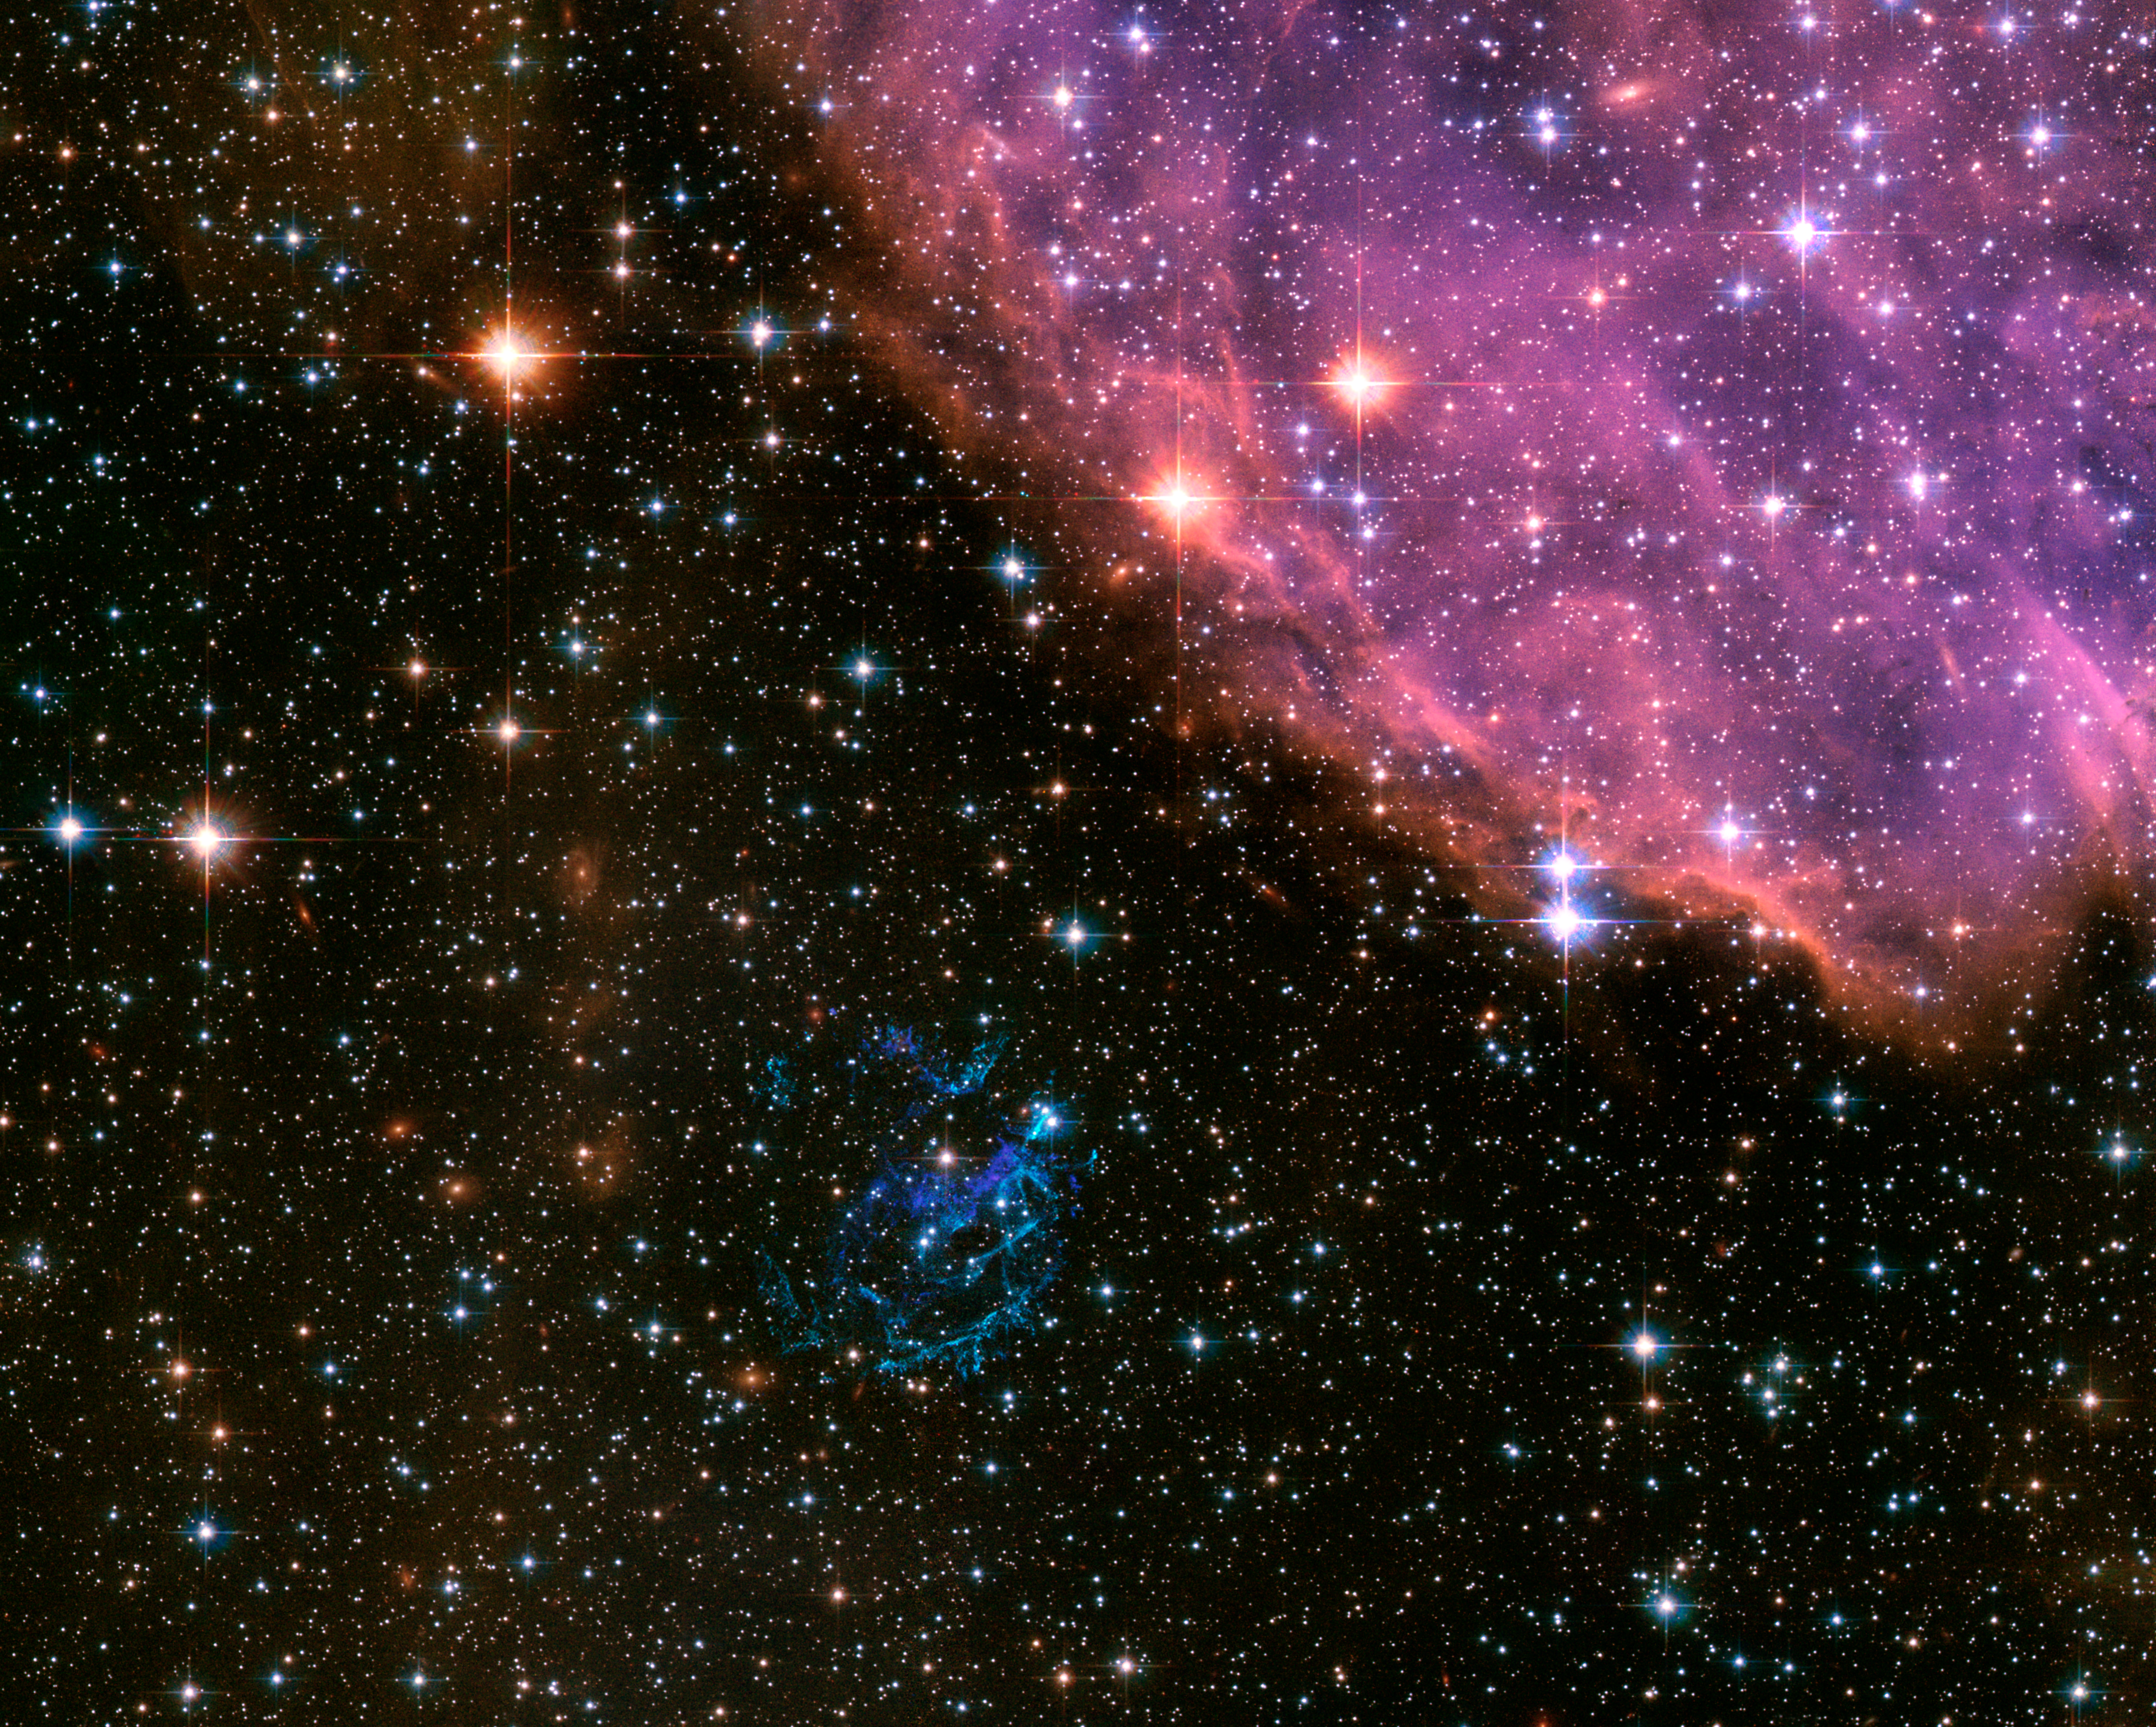

Hubble’s Distant View of the Supernova Remnant 1E 0102.2-7219 in 2006

In the wake of Independence Day festivities surrounding the U.S. July 4th holiday, astronomers and image processors at the Space Telescope Science Institute are releasing the Hubble Space Telescope image of a cosmic explosion that is quite similar to fireworks on Earth. In the nearby galaxy, the Small Magellanic Cloud, a massive star has exploded as a supernova, and begun to dissipate its interior into a spectacular display of colorful filaments. The supernova remnant (SNR), known as "E0102" for short, is the greenish-blue shell of debris just below the center of the Hubble image. Its name is derived from its cataloged placement (or coordinates) in the celestial sphere. More formally known as 1E0102.2-7219, it is located almost 50 light-years (15 parsecs) away from of the edge of the massive star-forming region, N 76, also known as Henize 1956 in the Small Magellanic Cloud.

This delicate structure glowing a multitude of lavenders and peach hues, resides in the upper right of the image. The composition and thus, the coloring, of the diffuse remnant in comparison to its star-forming neighbor is due to the presence of very large quantities of oxygen compared to hydrogen. E0102 is a member of the oxygen-rich class of SNRs showing strong oxygen and other more metal-like abundances in its optical and X-ray spectra, and an absence of hydrogen and helium. N 76 in contrast is made up primarily of glowing hydrogen emission. One explanation for the abundance of oxygen in the SNR is that the parent star was very large and old, and had blown away most its hydrogen as stellar wind before it exploded. It is surmised that the progenitor star that caused the supernova explosion may have been a Wolf-Rayet.

These stars, which can be upward of 20 times the mass of the sun and tens of thousands times more luminous, are famous for having a strong stellar wind throughout their lifetime. This stellar wind carried off material from the outer-most shells of the star (the hydrogen and helium shells), leaving the next most abundant element, oxygen, as a visible signature after the star exploded as a supernova. Determined to be only about 2000 years old, E0102 is relatively young on astronomical scales and is just beginning its interactions with the nearby interstellar medium. Young supernova remnants like E0102 allow astronomers to examine material from the cores of massive stars directly. This in turn gives insight on how stars form, their composition, and the chemical enrichment of the surrounding area. As well, young remnants are a great learning tool to better understand the physics of supernova explosions.

E0102 was observed in 2003 with the Hubble Advanced Camera for Surveys. Four filters that isolate light from blue, visible, and infrared wavelengths and hydrogen emission were combined with oxygen emission images of the SNR taken with the Wide Field Planetary Camera 2 in 1995. The Small Magellanic Cloud is a nearby dwarf galaxy to our own Milky Way. It is visible in the Southern Hemisphere, in the direction of the constellation Tucana, and lies roughly 210,000 light-years (65 000 parsecs) distant.

Credit: NASA, ESA and the Hubble Heritage Team (STScI/AURA)